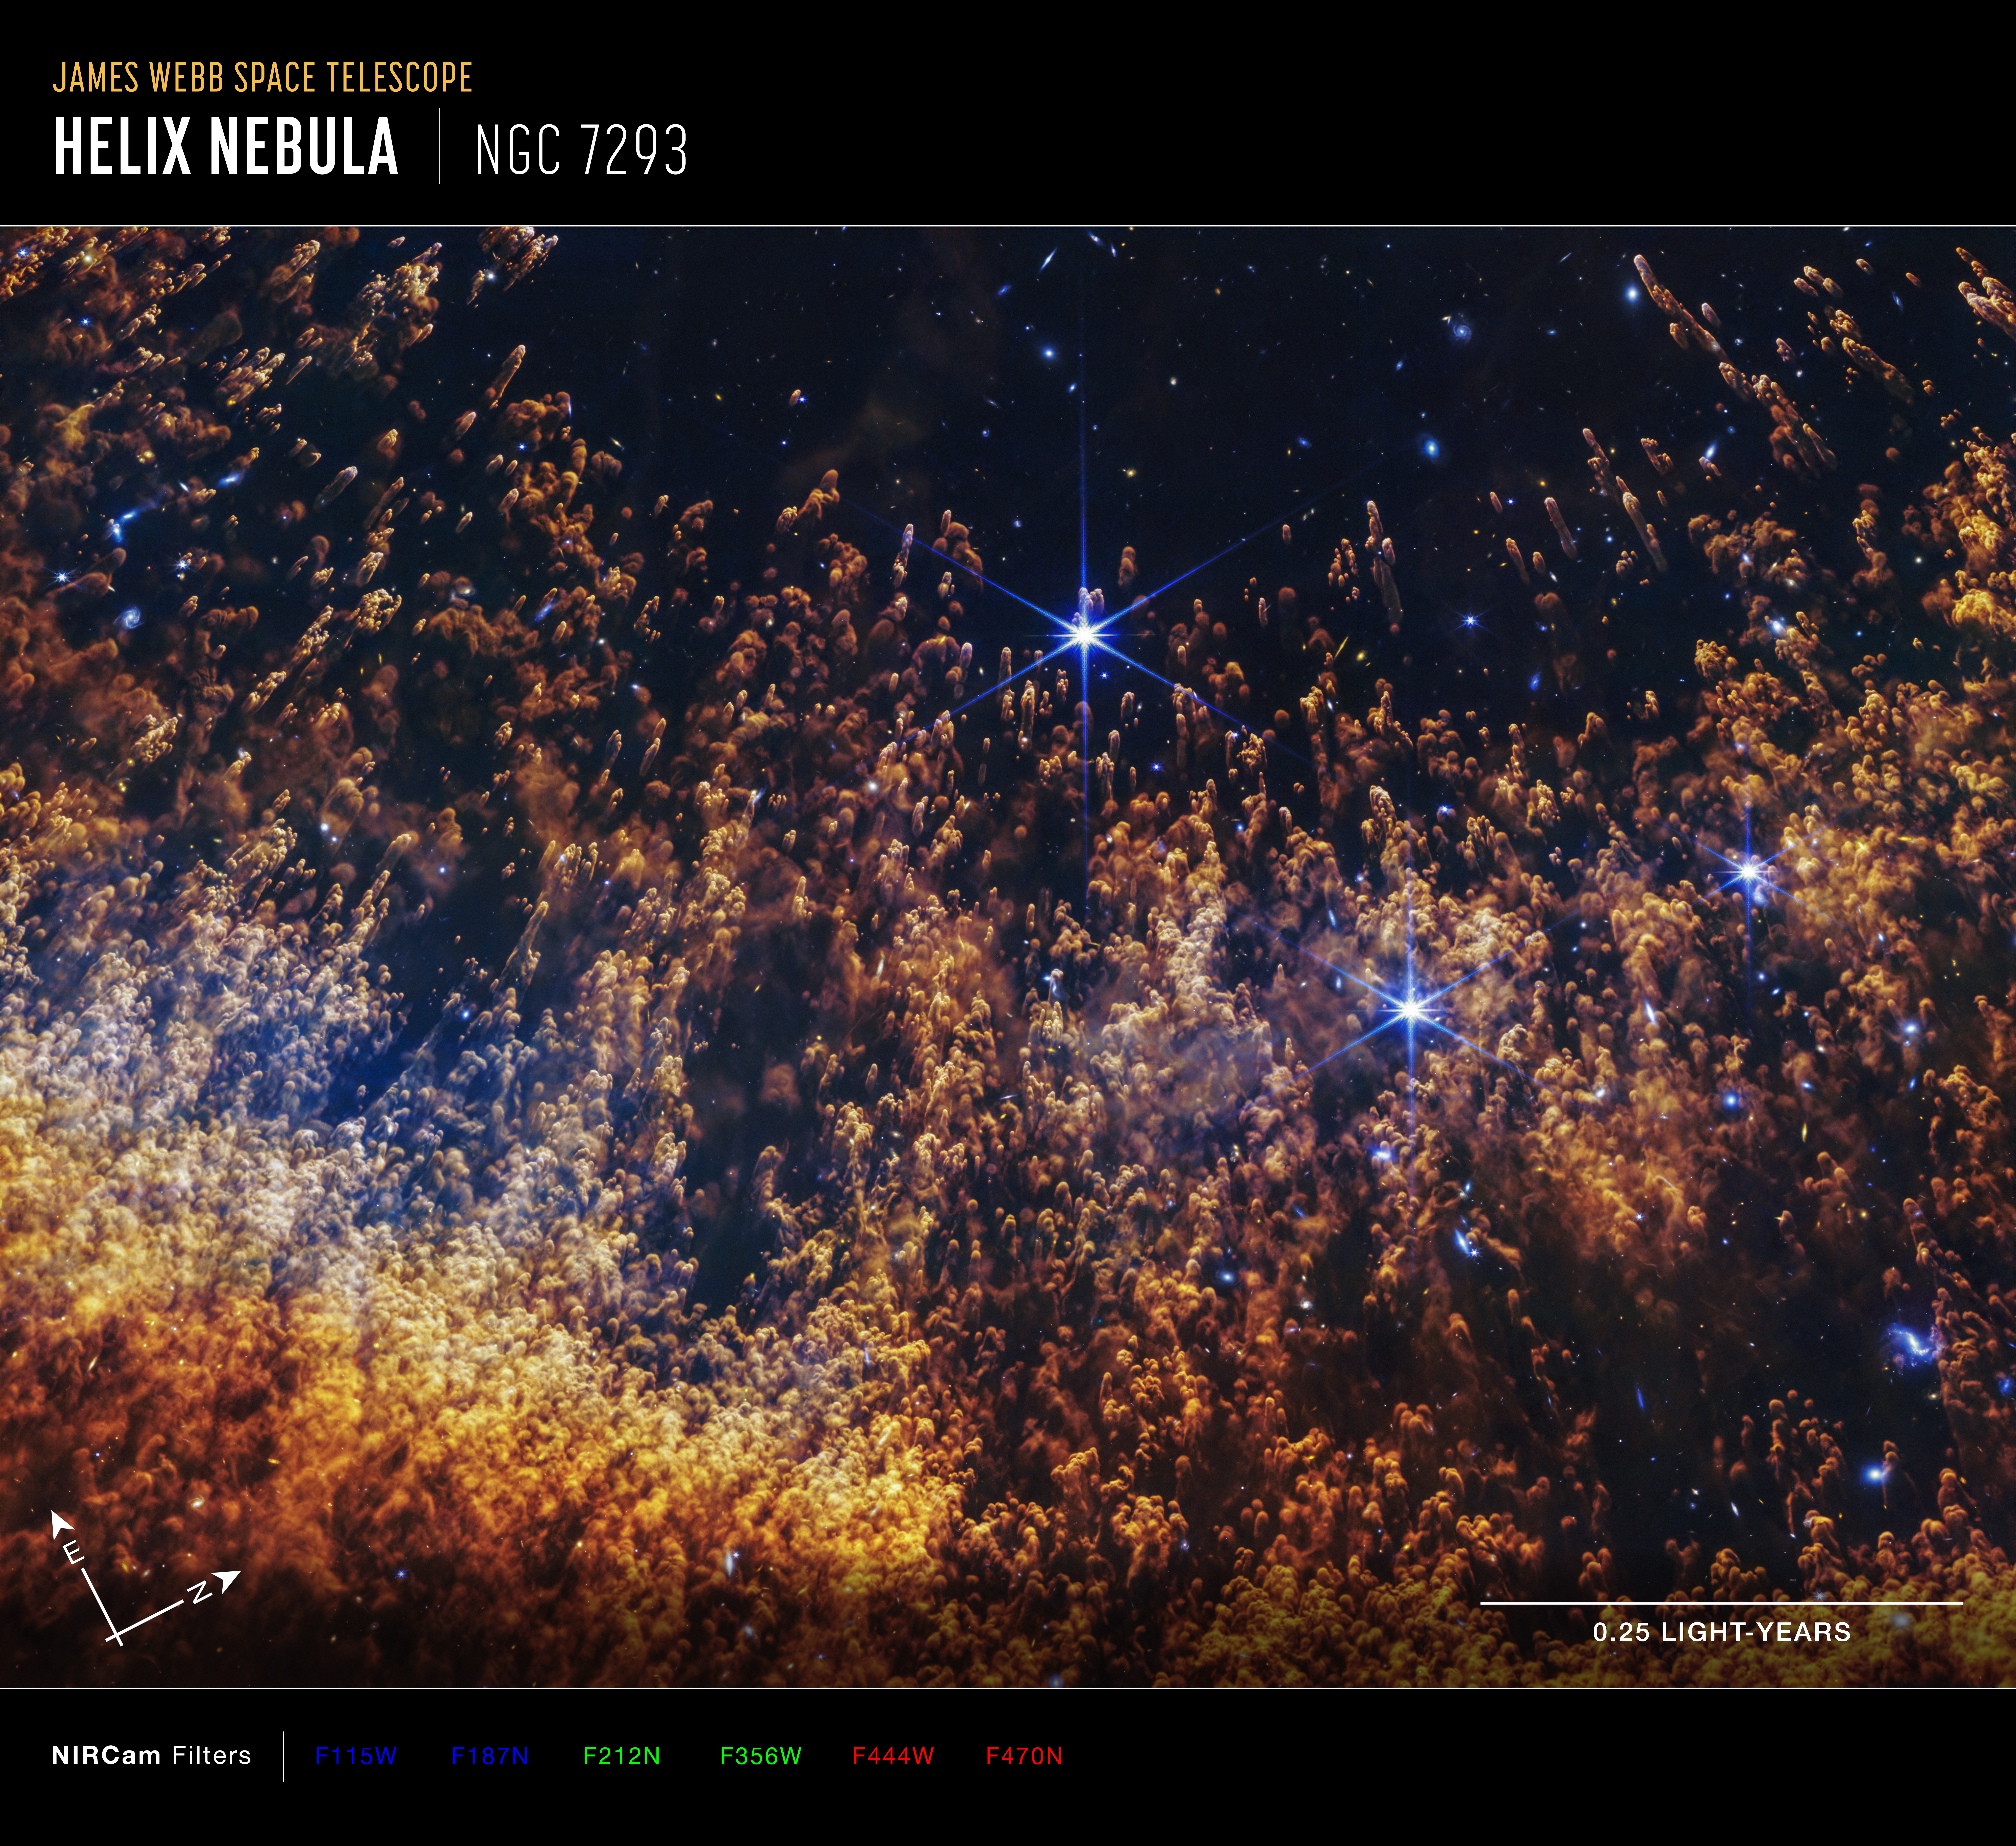

Helix Nebula (NIRcam image, annotated)

This image of the Helix Nebula, captured by the NIRCam (Near-Infrared Camera) instrument on the James Webb Space Telescope includes compass arrows, scale bar, and color key for reference.

To create this image, near-infrared wavelengths of light have been translated into visible-light colors. The color key at the bottom shows which NIRCam filters were used, and which visible-light color was assigned to that filter.

The north and east compass arrows show the orientation of the image on the sky. Note that the relationship between north and east on the sky (as seen from below) is flipped relative to direction arrows on a map of the ground (as seen from above).

Credit: NASA, ESA, CSA, STScI, A. Pagan (STScI)